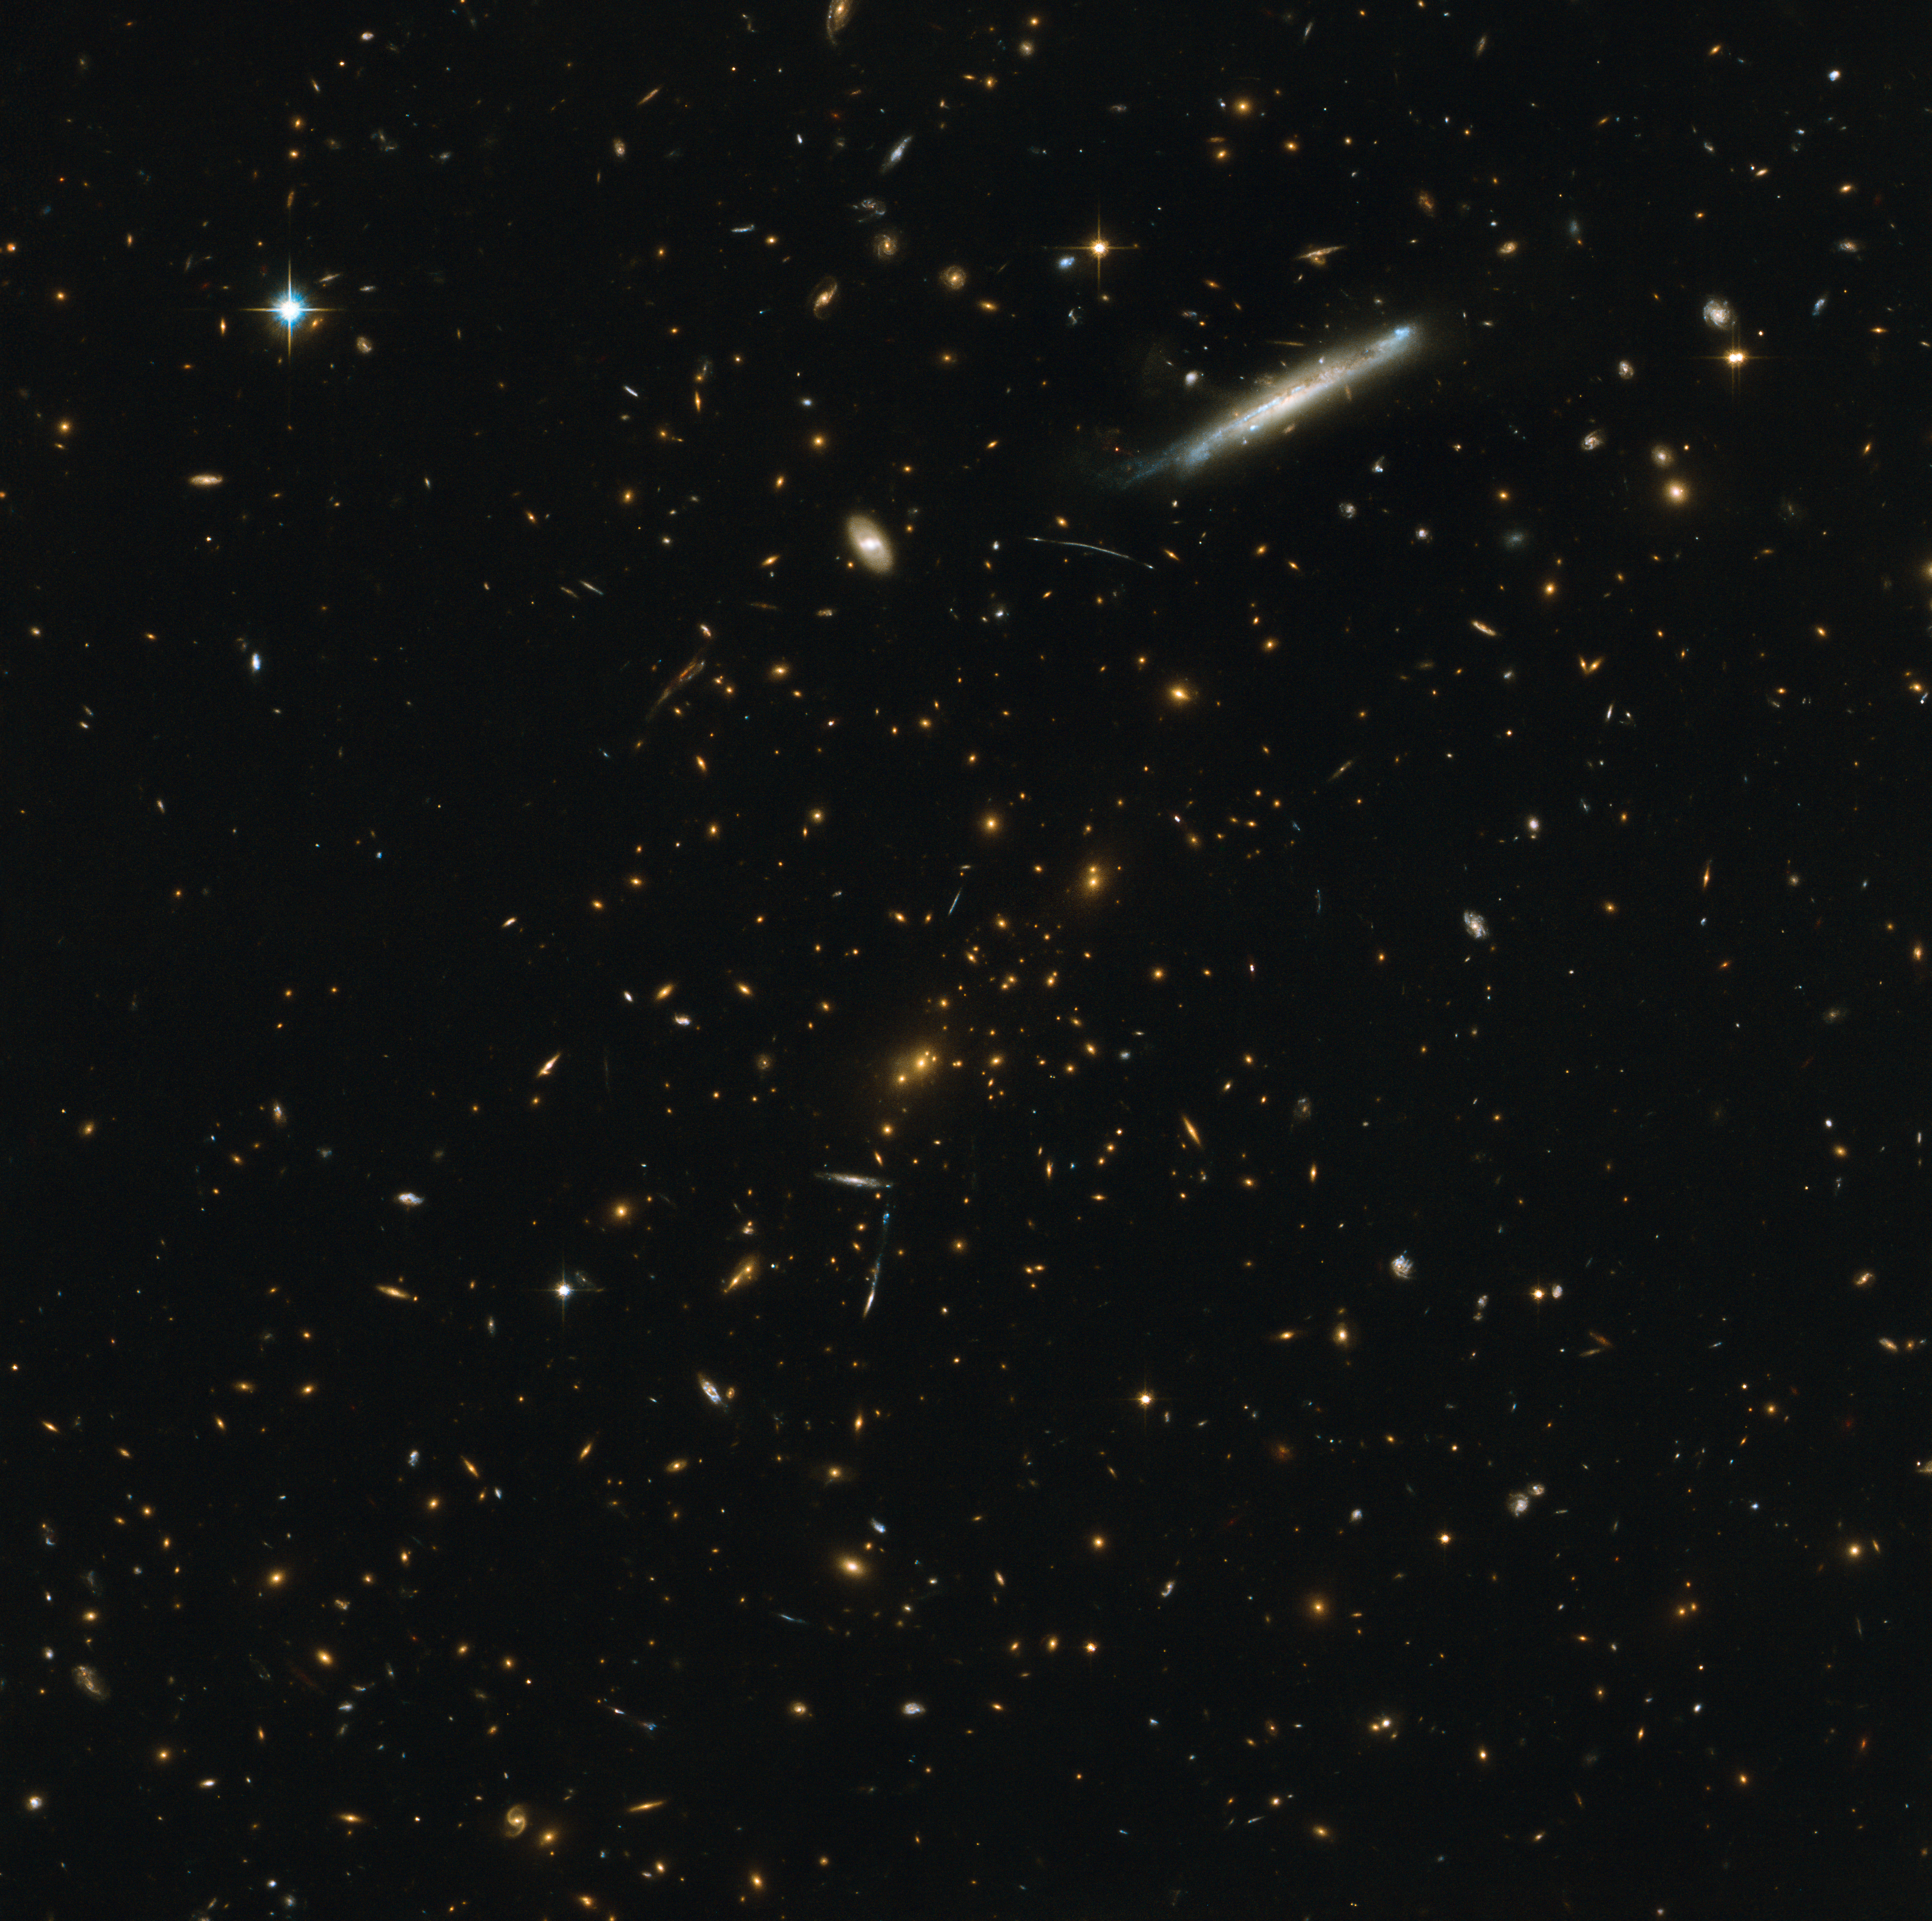

Galaxy cluster RCS2 J2327

This image shows the galaxy cluster RCS2 J2327. The mass of the cluster causes both strong and weak gravitational lensing, which can be used to calculate the mass of the cluster. This image is a composite of observations from the HAWK-I instrument on ESO’s Very Large Telescope and the NASA/ESA Hubble Space Telescope’s Advanced Camera for Surveys. It demonstrates an impressively detailed collaborative approach to studying weak lensing in the cosmos.

Credit: ESO & ESA/Hubble & NASA